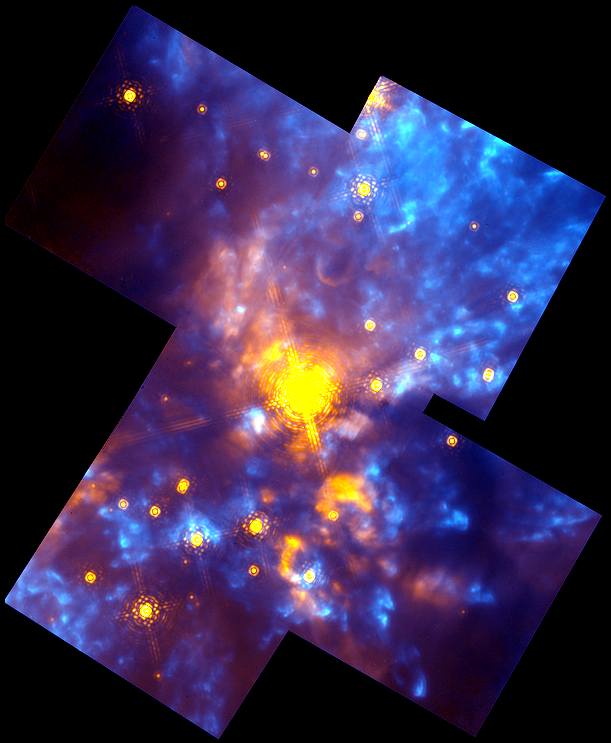

The Orion Nebula OMC-1 Region

NICMOS's infrared vision reveals a chaotic, active star birth region (as seen in the right-hand image). Here, stars and glowing interstellar dust, heated by and scattering the intense starlight, appear yellow-orange. Emission by excited hydrogen molecules appears blue. The image is oriented with north up and east to the left. The diagonal extent of the image is about 0.4 light-years. Some details are as small as the size of our solar system.

Credit: Rodger Thompson, Marcia Rieke, Glenn Schneider, Susan Stolovy (University of Arizona); Edwin Erickson (SETI Institute/Ames Research Center); David Axon (STScI); and NASA/ESA